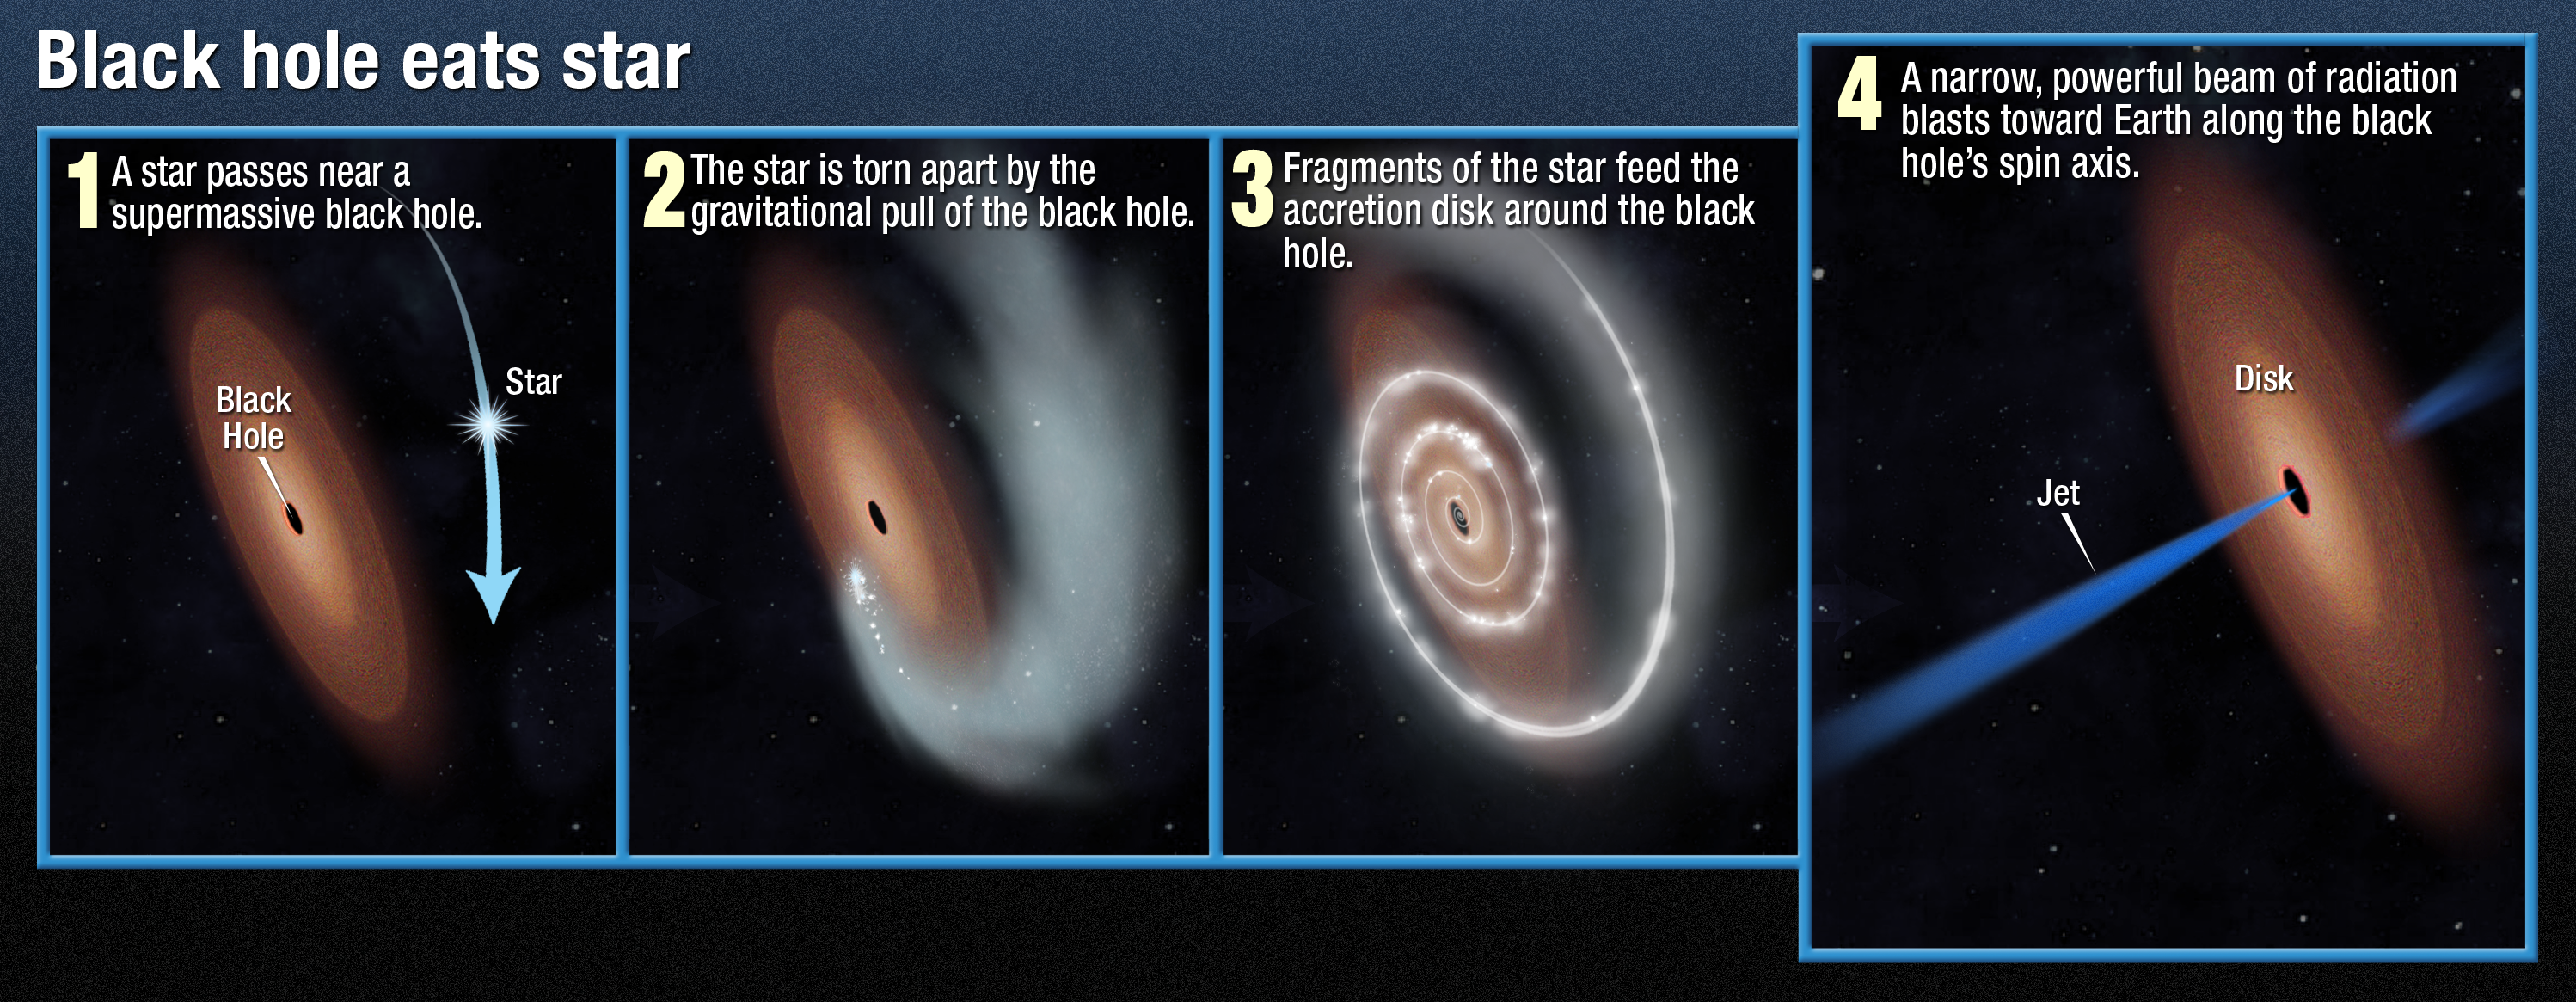

Black hole eats star

The NASA/ESA Hubble Space Telescope has pinpointed the source of one of the most puzzling blast of high-energy radiation ever observed. It is at the very center of a small, distant galaxy, which appears to be sending a beam of radiation directly toward Earth.

This diagram explains how a star being torn apart by a black hole’s gravitational force is thought likely to be the cause of a powerful beam of X-rays and gamma rays which is pointed towards Earth. If confirmed, this would be the first time this phenomenon has been observed.

Credit: NASA, ESA and A. Feild (STScI)